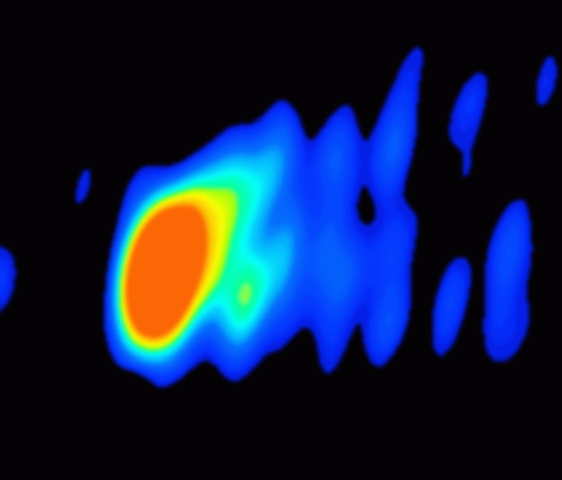

Close-up look at a jet near a black hole in galaxy M87 (ground-based view)

A Very Long Baseline Array (VLBA) radio image of the region close to the black hole, where an extragalactic jet is formed into a narrow beam by magnetic fields. The false colour corresponds to the intensity of the radio energy being emitted by the jet. The red region is about 1/10 light-year across. The image was taken in March 1999.

Credit: National Radio Astronomy Observatory/Associated Universities, Inc